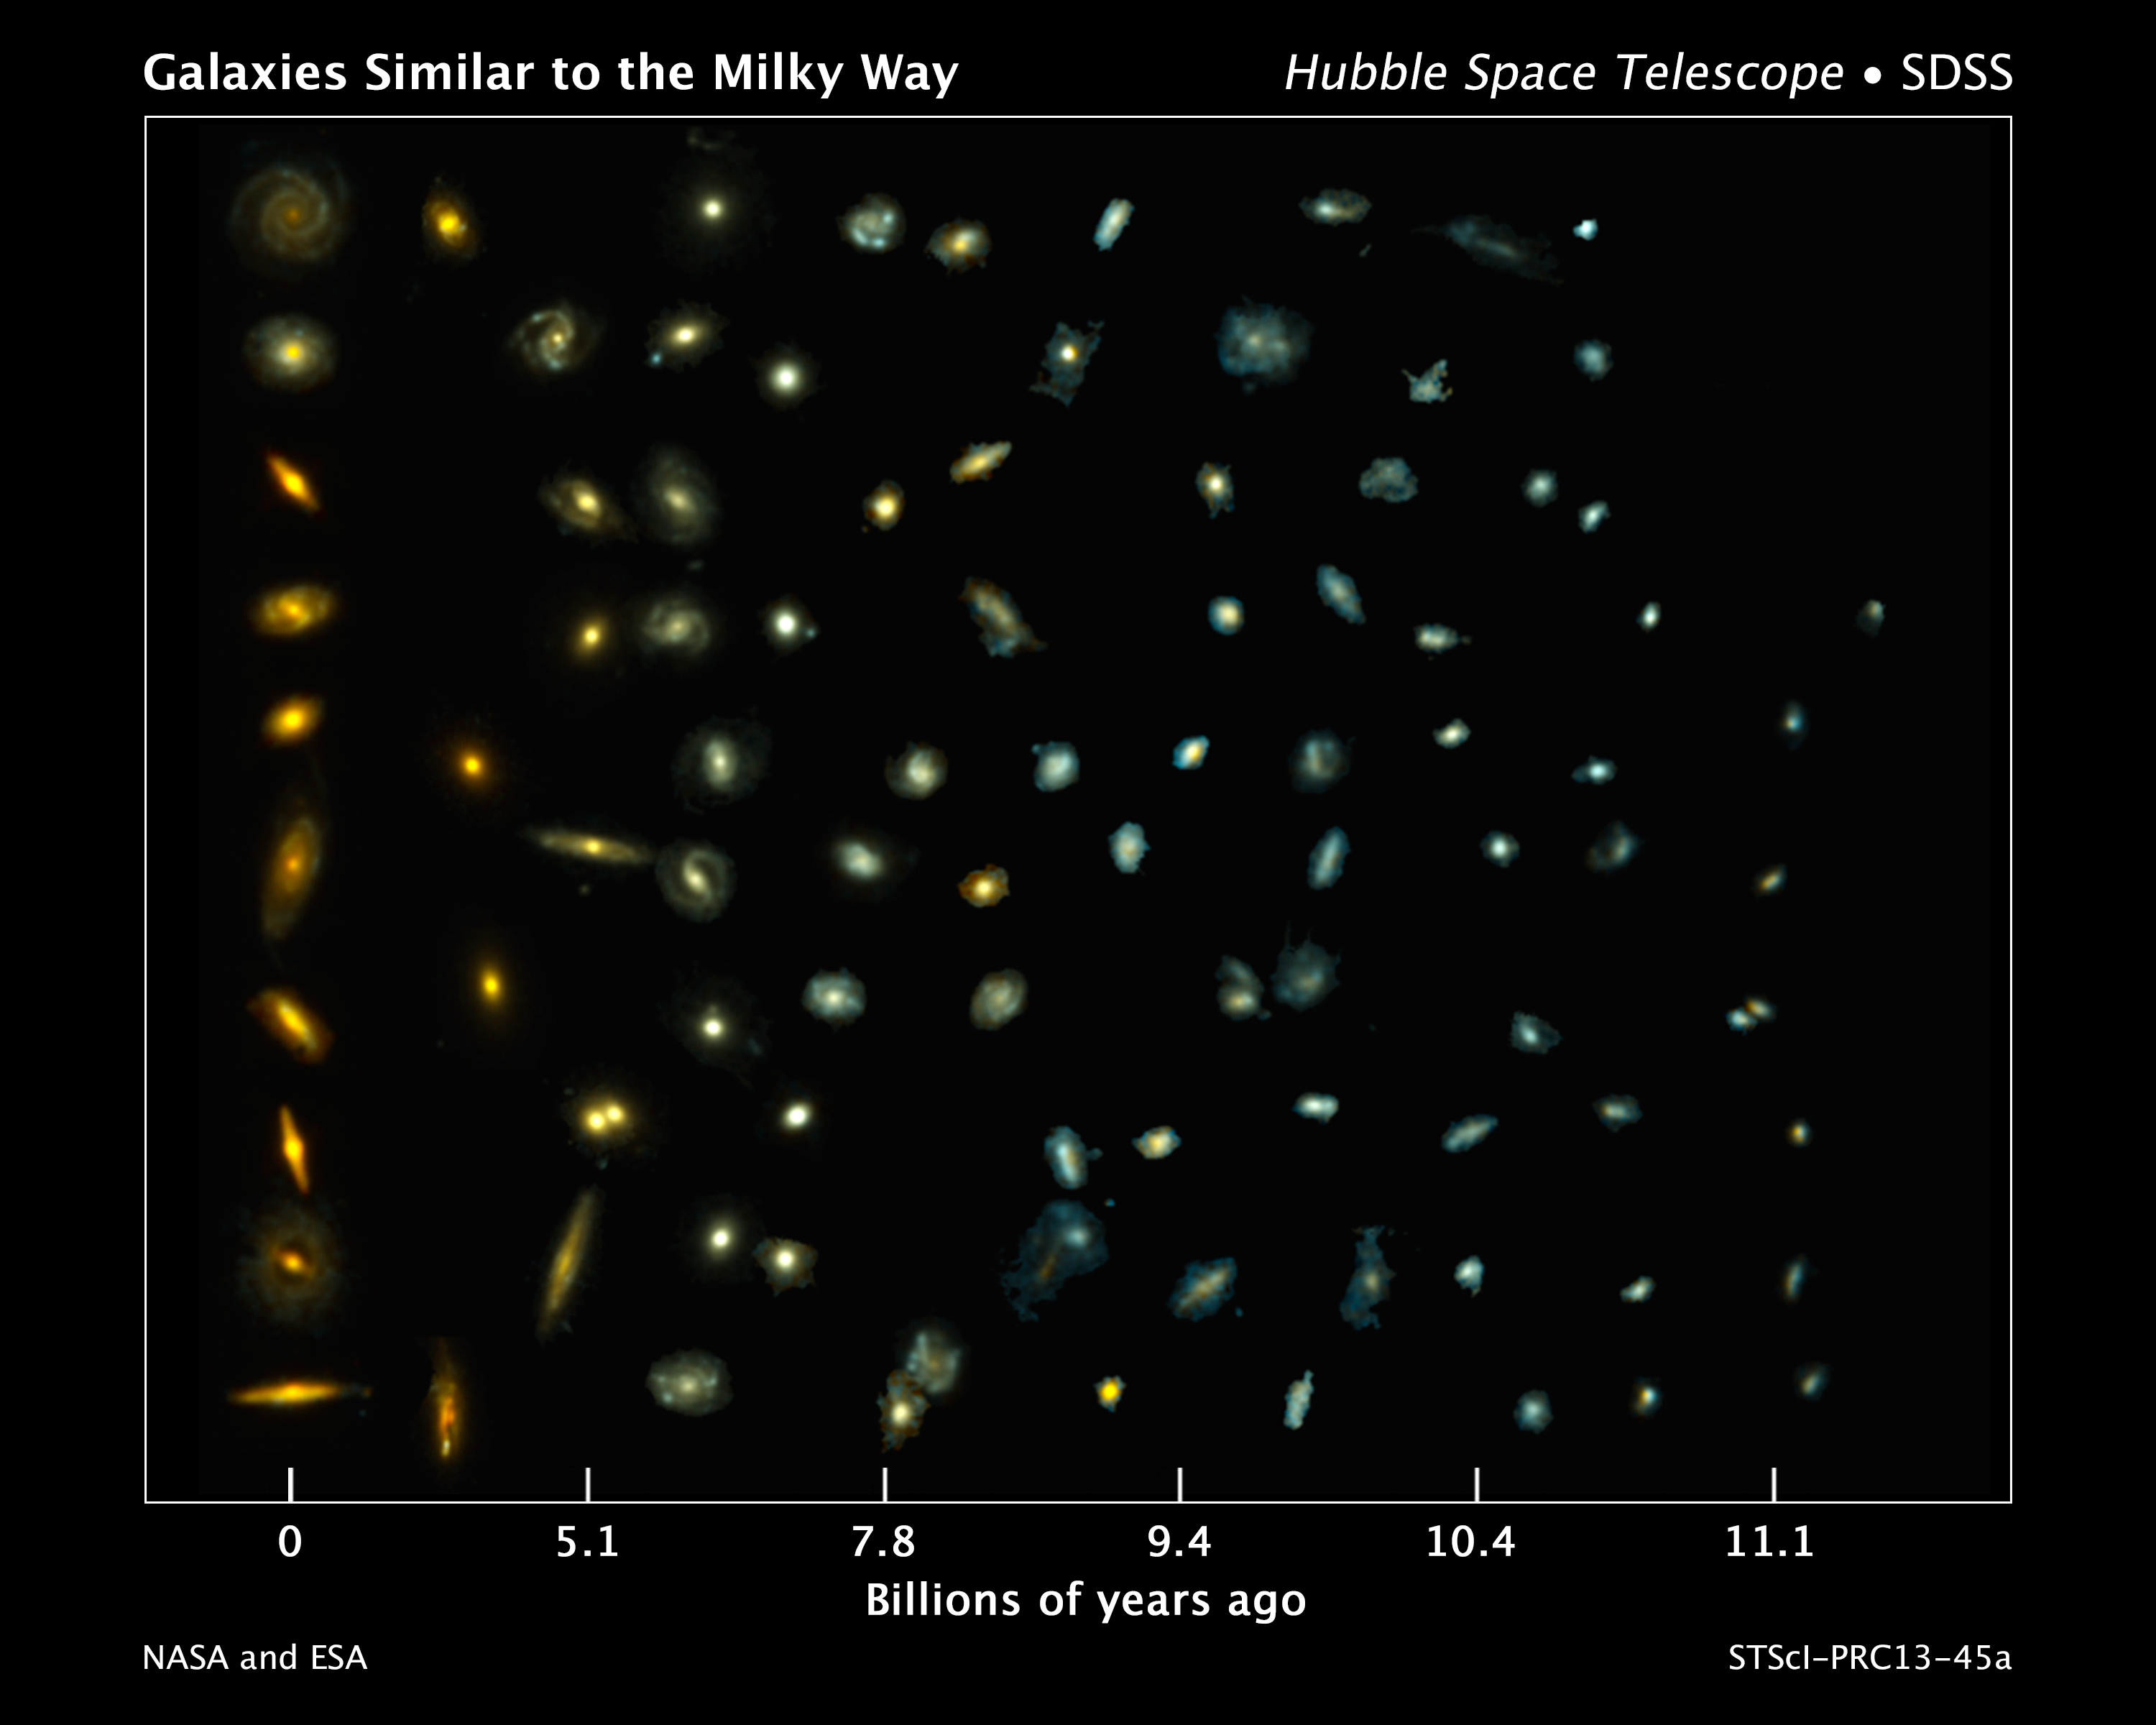

Tracing the growth of Milky Way-like galaxies

This composite image shows examples of galaxies similar to our Milky Way at various stages of construction over a time span of 11 billion years.

The galaxies are arranged according to time. Those on the left reside nearby, while those at the far right existed when the cosmos was about 2 billion years old. The bluish glow from young stars dominates the colour of the galaxies on the right. The galaxies on the left are redder from the glow of older stellar populations.

Astronomers found the distant galaxies in two NASA/ESA Hubble Space Telescope surveys: 3D-HST, and the Cosmic Assembly Near-infrared Deep Extragalactic Legacy Survey, or CANDELS. The observations were made in visible and near-infrared light by Hubble's Wide Field Camera 3 and Advanced Camera for Surveys. The nearby galaxies were taken from the Sloan Digital Sky Survey.

This image traces Milky Way-like galaxies over most of cosmic history, revealing how they evolve over time. Hubble's sharp vision resolved the galaxies' shapes, showing that their bulges and discs grew simultaneously.

Credit: NASA, ESA, P. van Dokkum (Yale University), S. Patel (Leiden University), and the 3D-HST Team